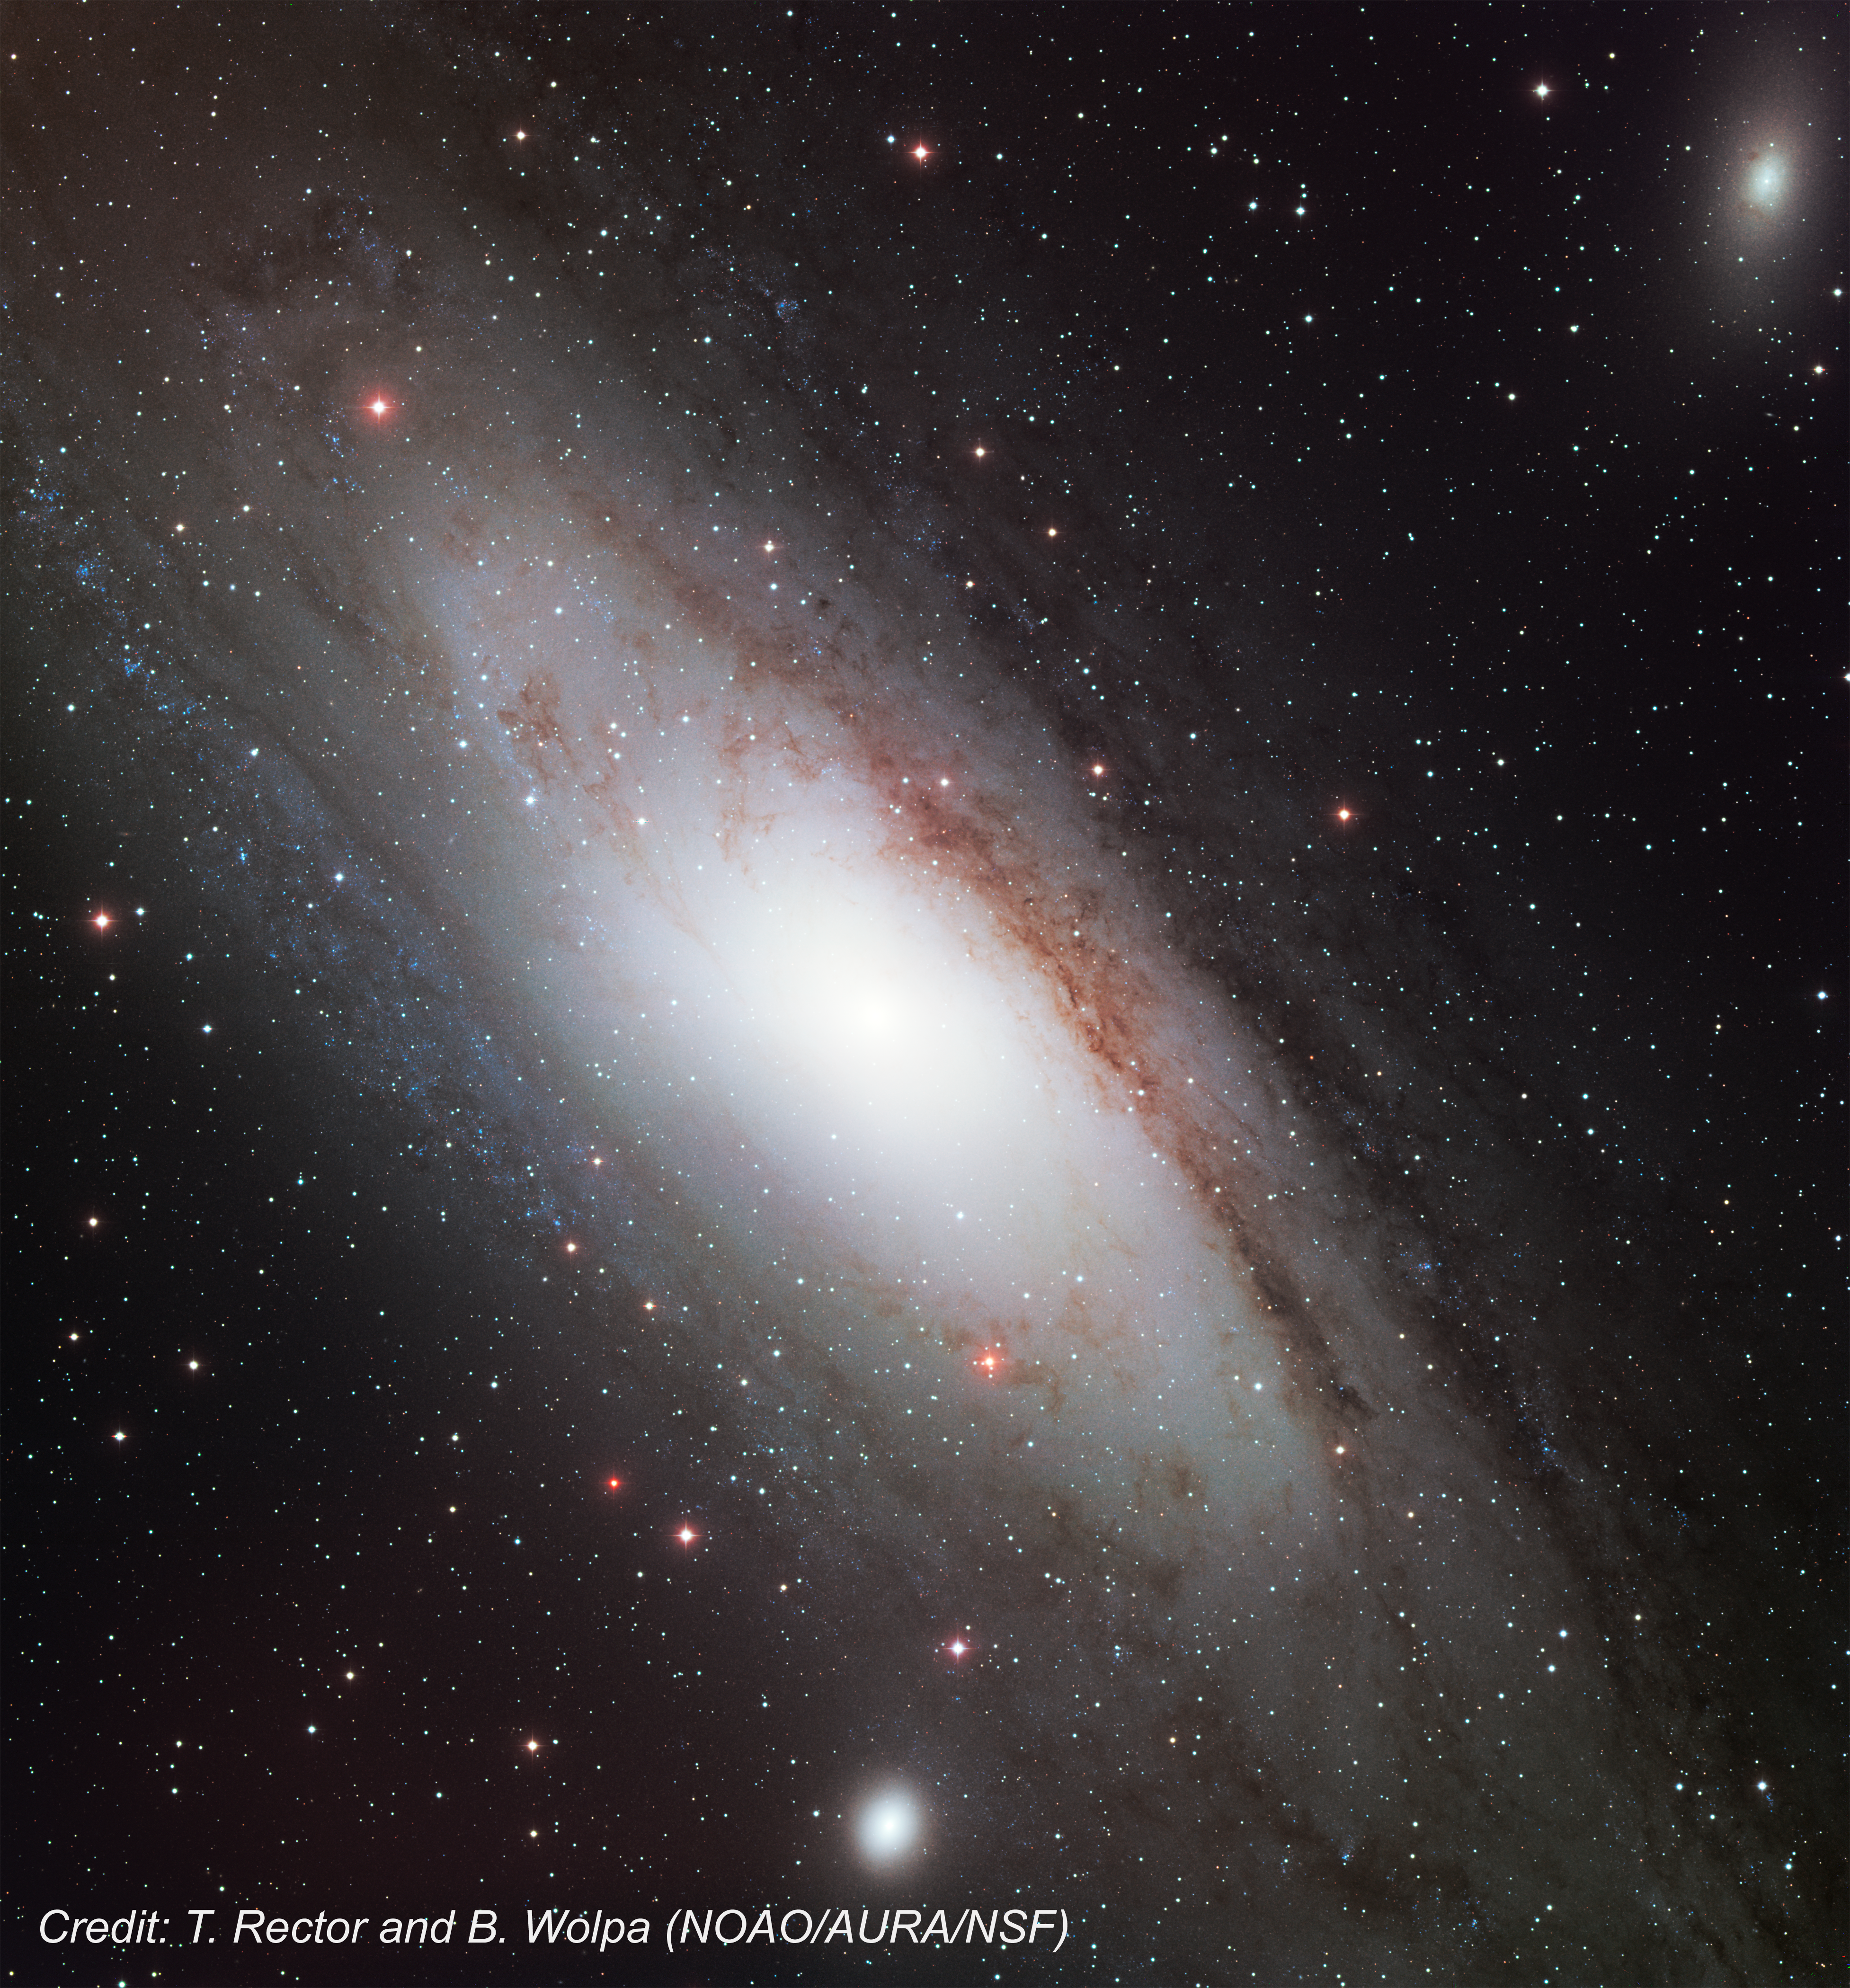

Ground-based image of Andromeda Galaxy, M31

This image, from the WIYN/KPNO 0.9-meter telescope, shows the Andromeda Galaxy, the nearest spiral galaxy to the Milky Way.

Credit: T. Rector and B. Wolpa (NOAO/AURA/NSF)